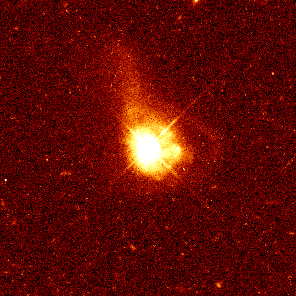

Quasar 0316-346

Hubble has captured a tidal tail of dust and gas beneath quasar 0316-346, located 2.2 billion light-years from Earth. The peculiar-shaped tail suggests that the host galaxy has interacted with a passing galaxy that is not in the image.

Credit: John Bahcall (Institute for Advanced Study, Princeton) Mike Disney (University of Wales) and NASA/ESA